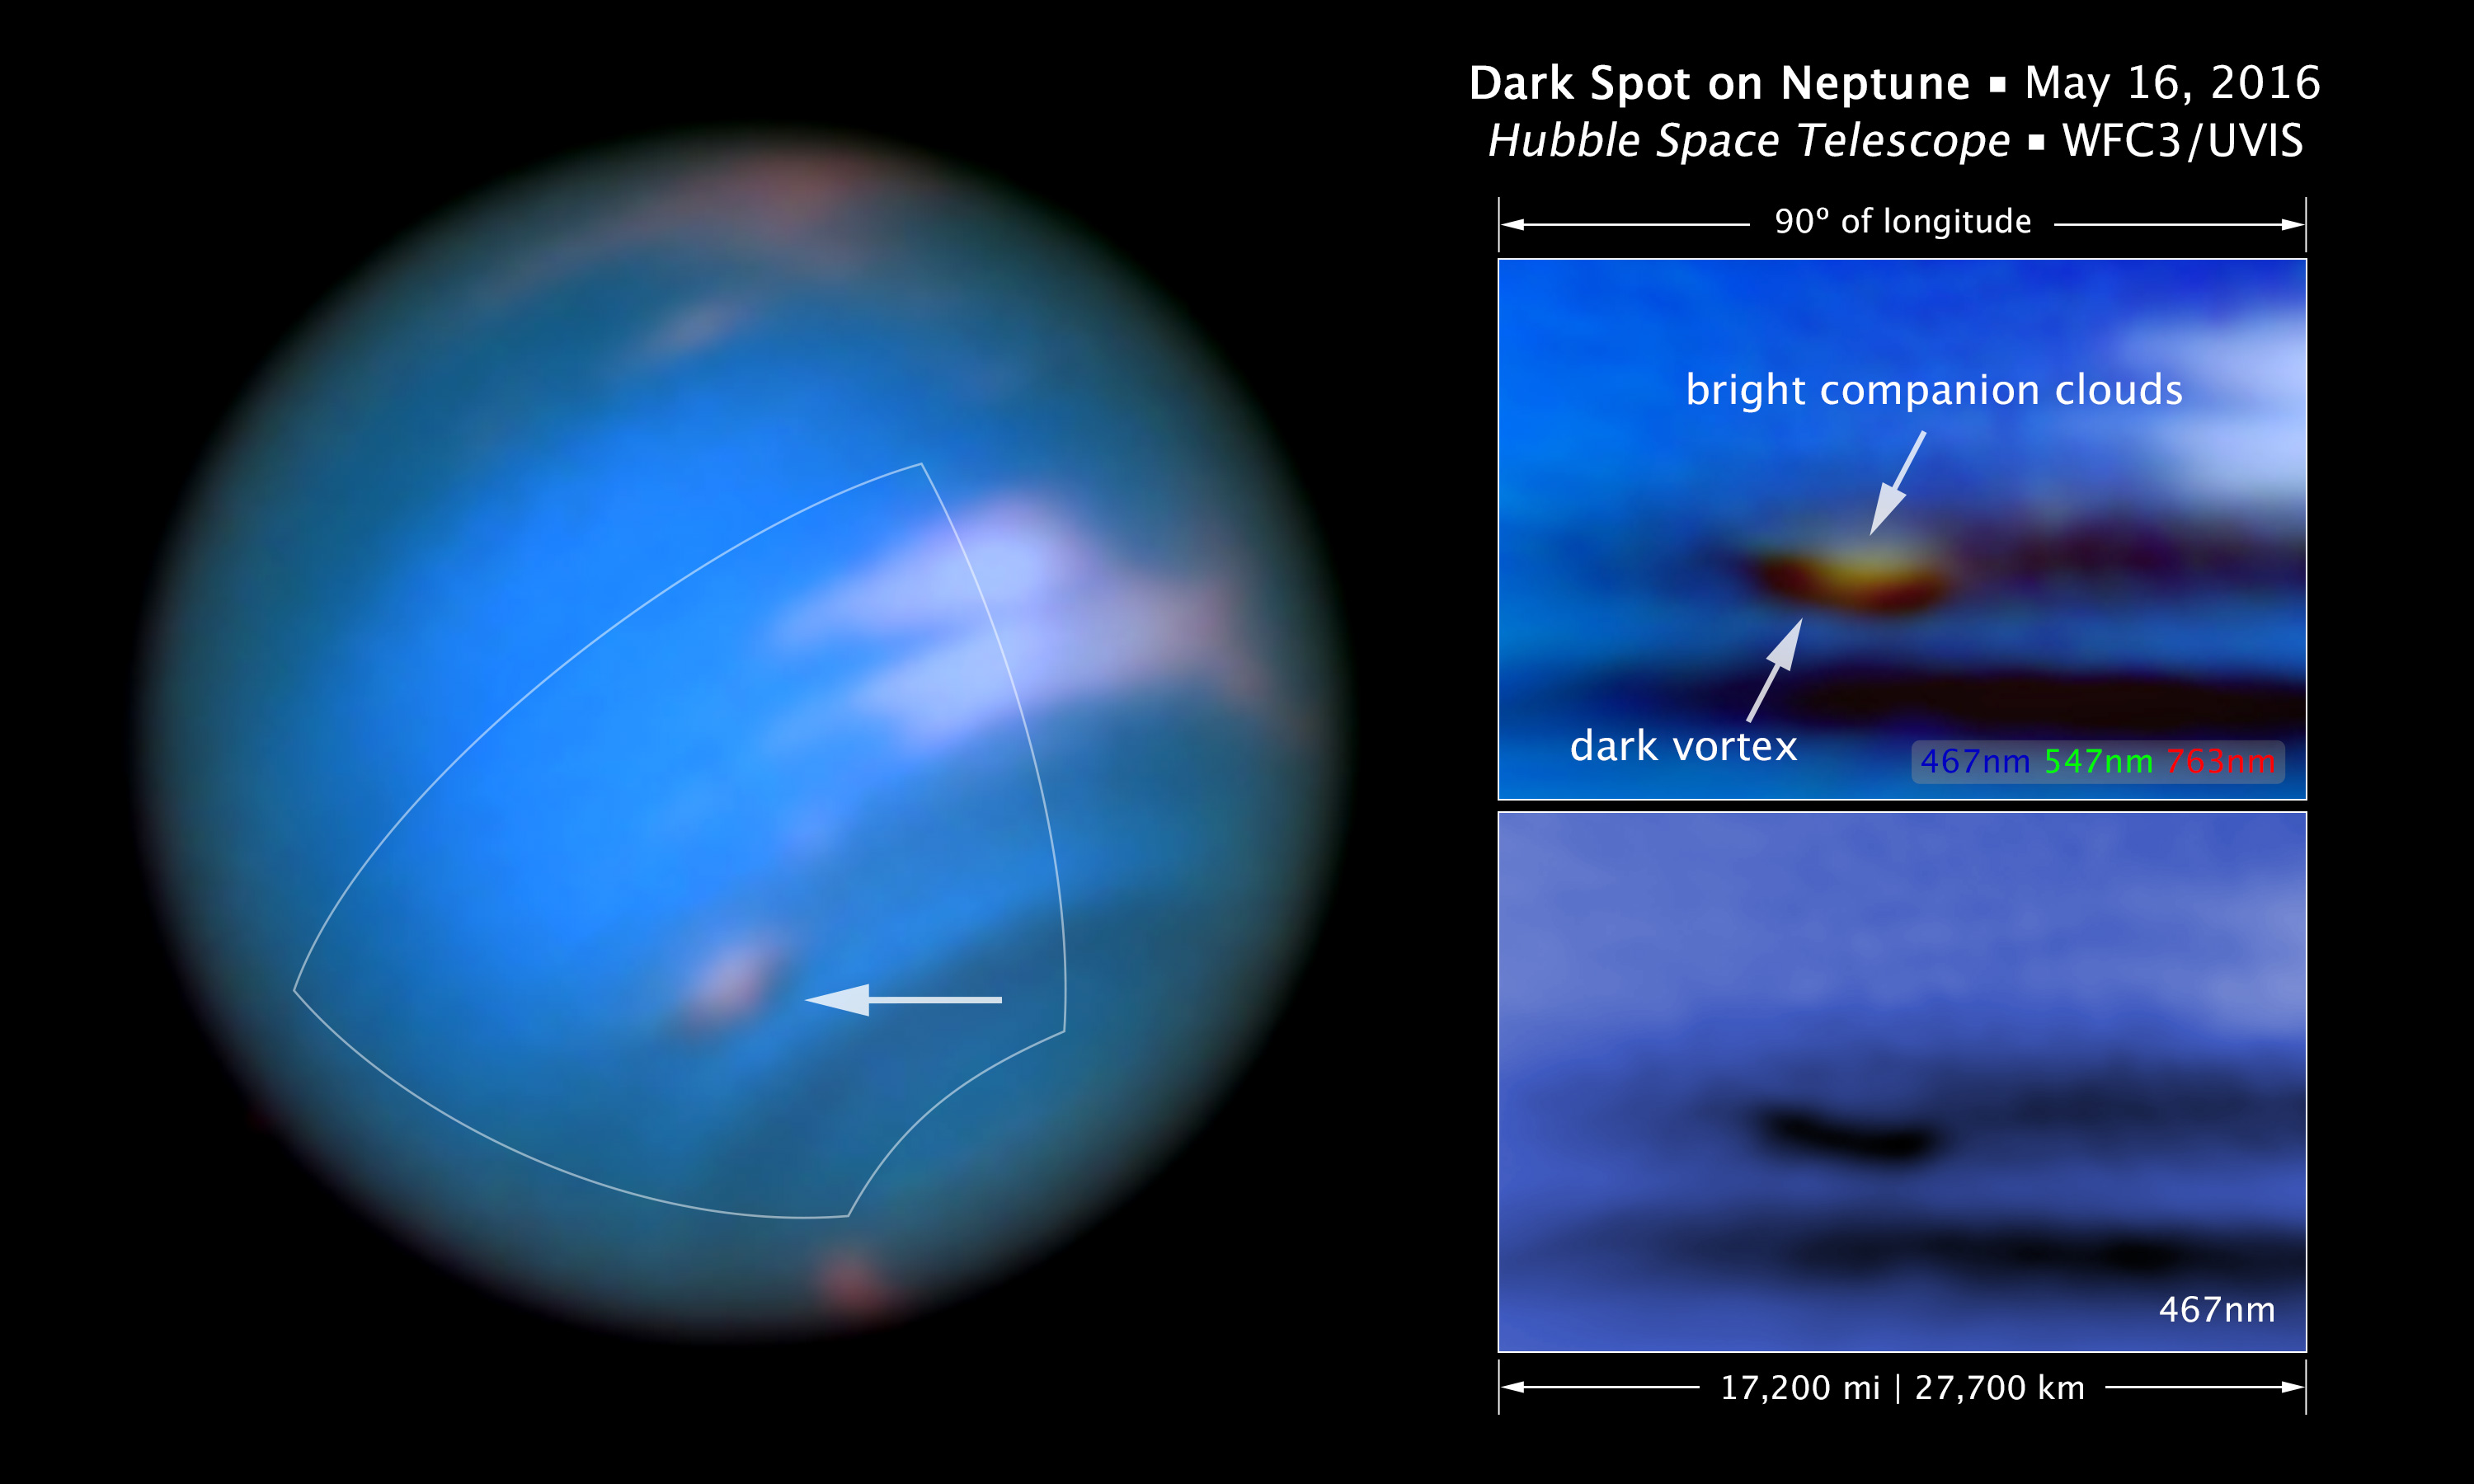

Scale and compass image for dark spot on Neptune

This new image taken with the NASA/ESA Hubble Space Telescope confirms the presence of a dark vortex in the atmosphere of Neptune. The full visible-light image at left shows that the dark feature resides near and below a patch of bright clouds in the planet's southern hemisphere. The dark spot measures roughly 4,800 kilometers across. Other high-altitude clouds can be seen at the planet's equatorial region and polar regions.

The full-colour image at top right is a close-up of the complex feature. Pancake-shaped clouds above the spot form when ambient air is perturbed and diverted upward over the vortex. The vortex is a high-pressure system.

The image at bottom right shows that the vortex is best seen at blue wavelengths. Only Hubble has the high resolution required for identifying such weather features on distant Neptune.

Though similar features were seen during the Voyager 2 flyby of Neptune in 1989 and by Hubble in 1994, this vortex is the first one observed on the planet in the 21st century. In September 2015, the Outer Planet Atmospheres Legacy (OPAL) program, a long-term Hubble Space Telescope project that annually captures global maps of the outer planets, revealed a dark spot close to the location of the bright clouds, which had been tracked from the ground. By viewing the vortex a second time, the new Hubble images, taken by Wide Field Camera 3 on May 16, 2016, confirm that OPAL really detected a long-lived feature. With the new data, the team created a higher-quality map of the vortex and its surroundings.

Credit: NASA, ESA, and M.H. Wong and J. Tollefson (UC Berkeley)